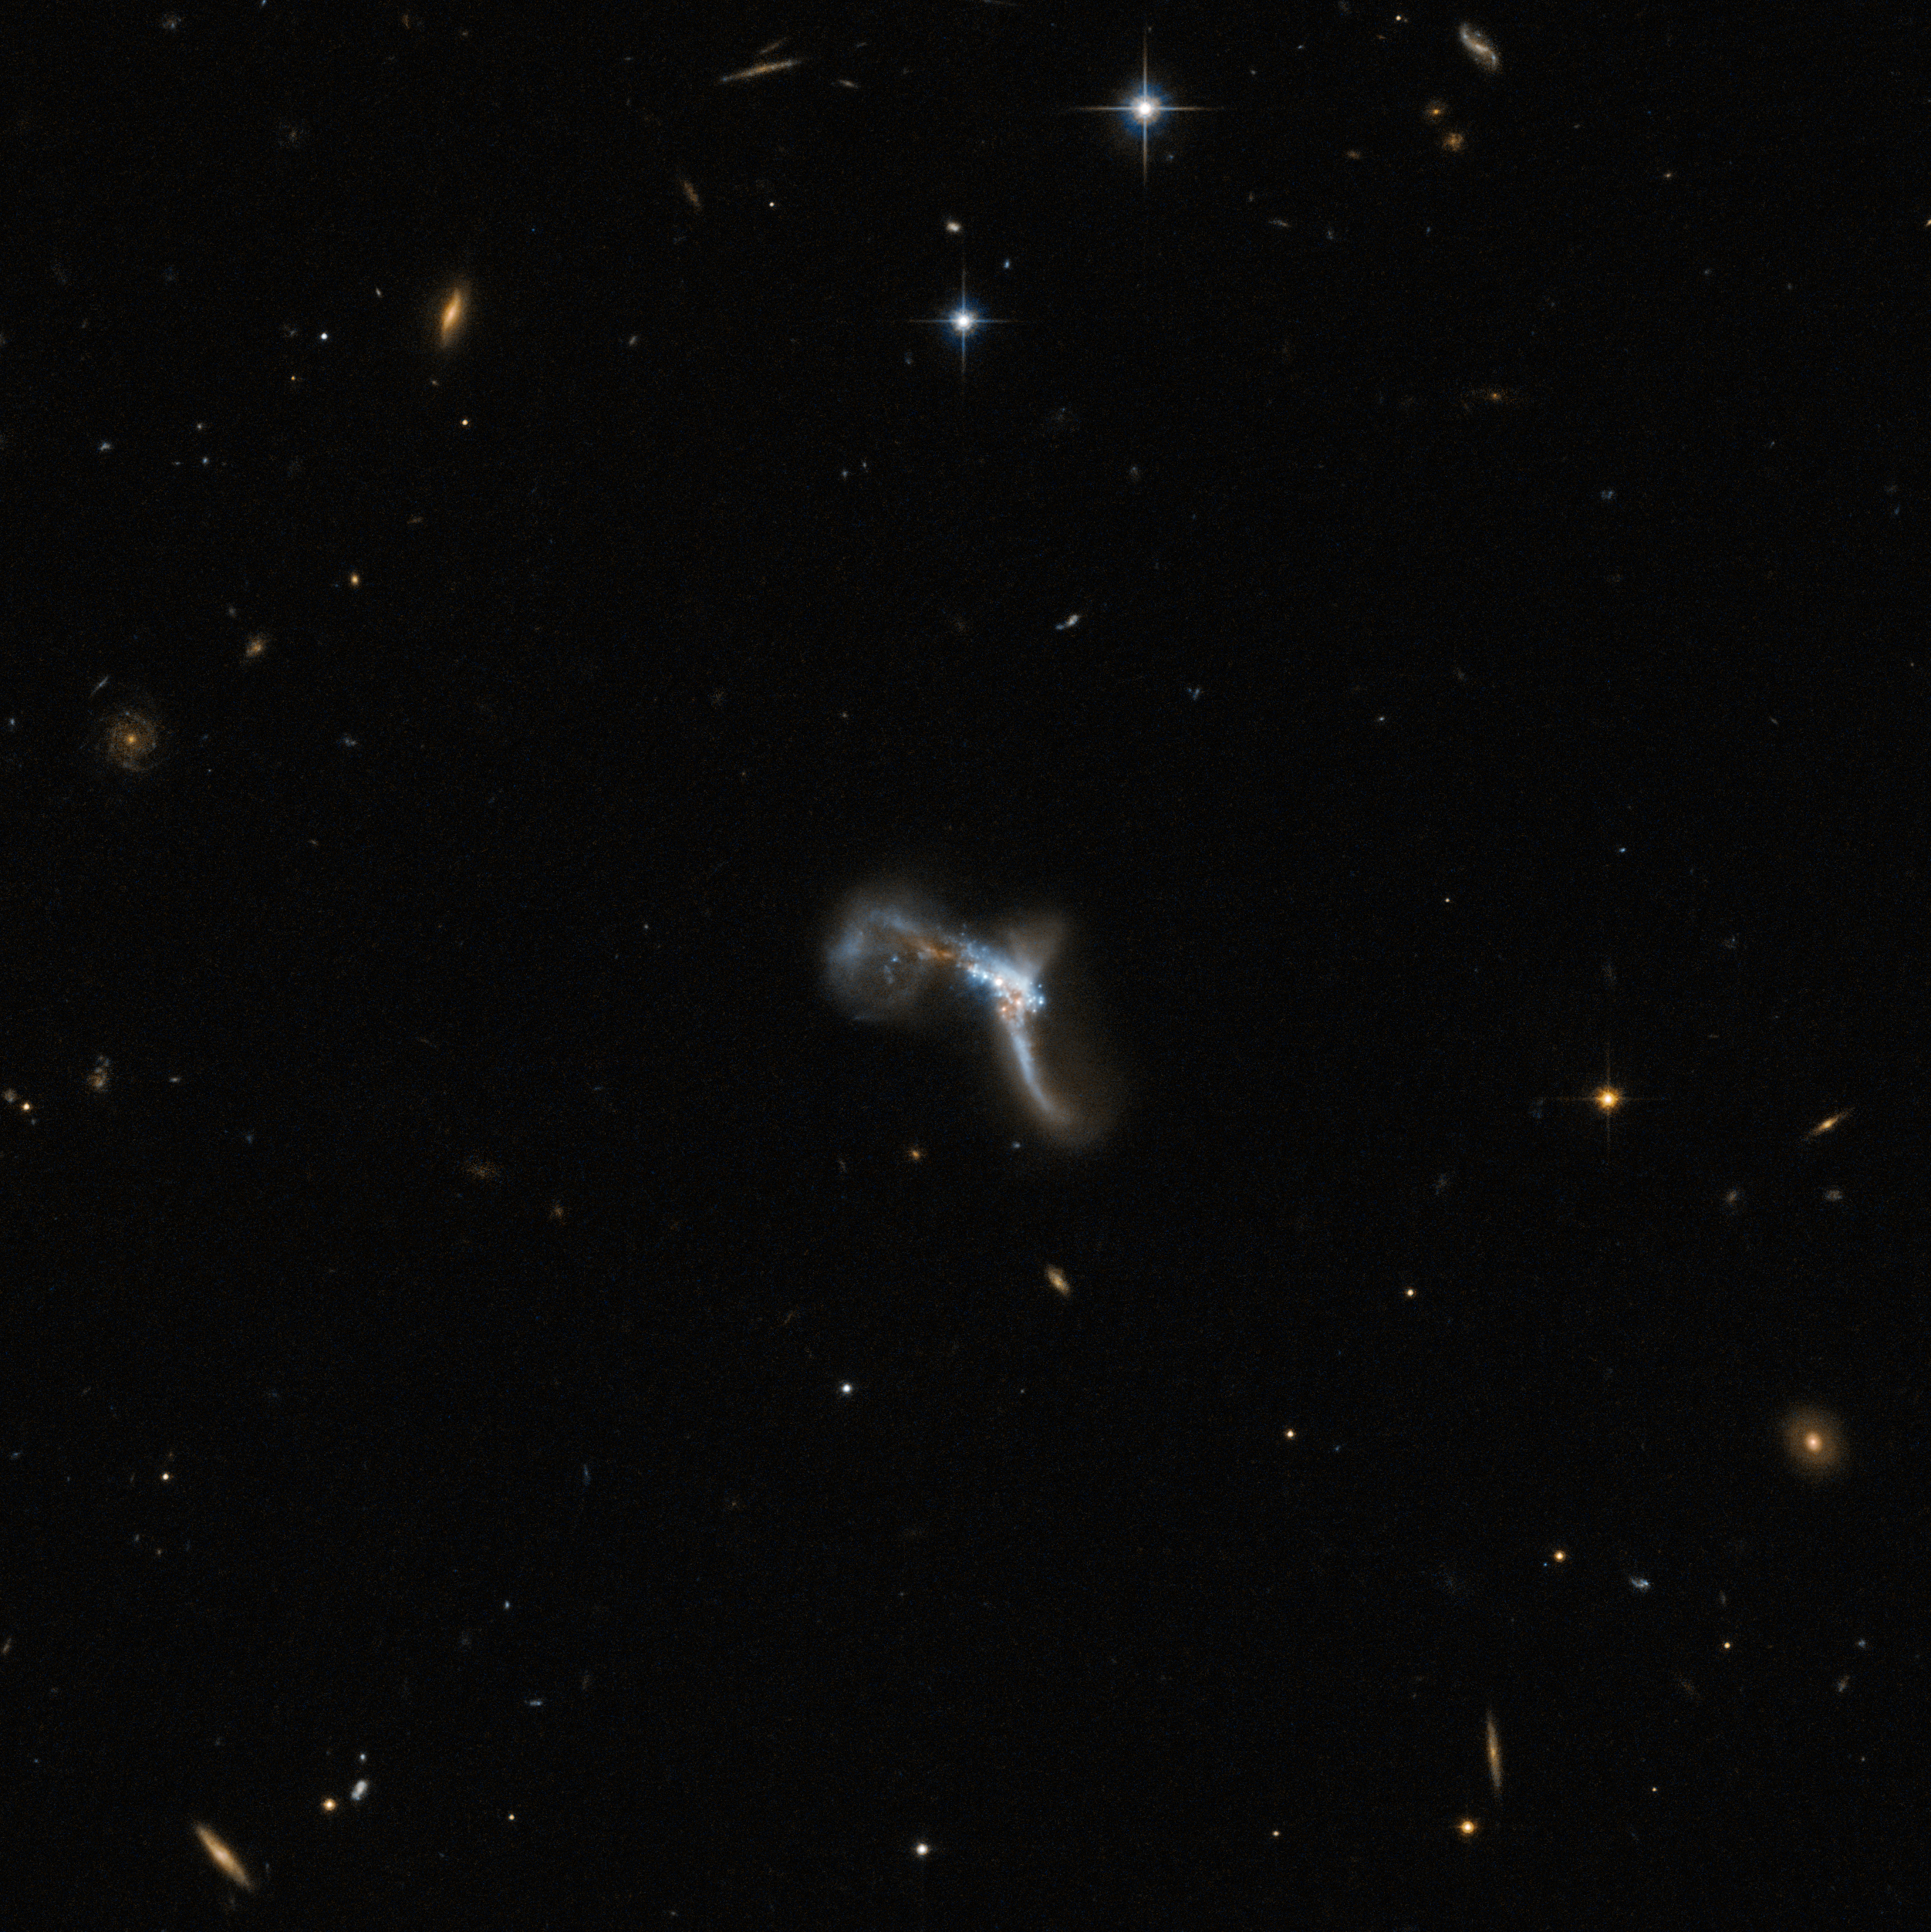

A very bright contortionist

The contorted object captured by Hubble in this picture is IRAS 22491-1808, also known as the South America Galaxy. It is an ultraluminous infrared galaxy (ULIRG) that emits a huge amount of light at infrared wavelengths. The reason for this intense infrared emission lies in an episode of strong star formation activity, which was set off by a collision between two interacting galaxies.

In this image the twisted shape hides a number of features. In the central region, which is very complex and disturbed, scientists have been able to distinguish two nuclei, remains of the two different galaxies that are currently colliding to form a new one. IRAS 22491-1808 is amongst the most luminous of these types of galaxies, and is considered to be mid-way through its merging stage.

The centre of this appealing object also shows several intense star-forming knots which, as seen in the picture, actually outshine the nuclei in optical wavelengths. To pick out the two merging nuclei in IRAS 22491-1808, scientists have had to observe it in infrared wavelengths, where they are more distinct.

Other traces of the galactic collision are the three very noticeable tails in the image — two linear and one circular. The tail extending towards the bottom of the image from the main body exhibits a red clump of star formation at its base.

Credit: ESA/Hubble & NASA